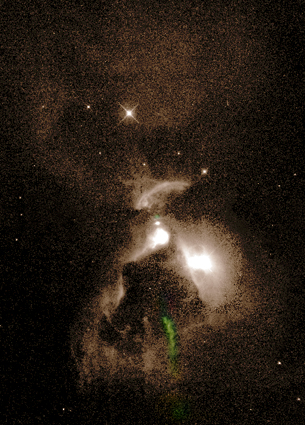

Haro 6-5B wider field

This wide-angle image (17,000 AU from top to bottom) shows the region around Haro 6-5b, which is located at the center of the field. Towards the bottom, colored in green, is a jet of glowing gas emitted from Haro 6-5b. The entire region is filled with dark dust. The disk of Haro 6-5b confines light emitted from the star into cones above and below the disk (something like a lampshade), illuminating the surrounding dust and forming the large hourglass-shaped pattern seen in the image.

Credit: John Krist (STScI) and the WFPC2 Science Team